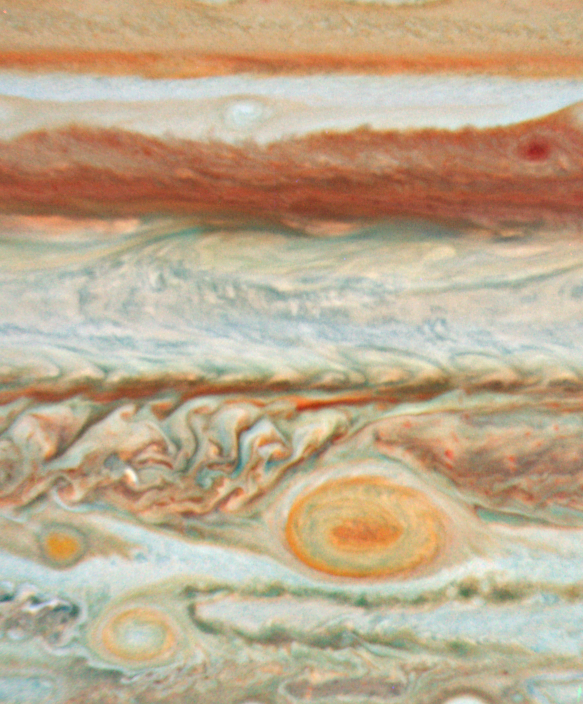

Jupiter - 15 May 2008

Jupiter - 15 May, 2008

Credit: NASA, ESA and A. Simon-Miller (NASA Goddard Space Flight Center)